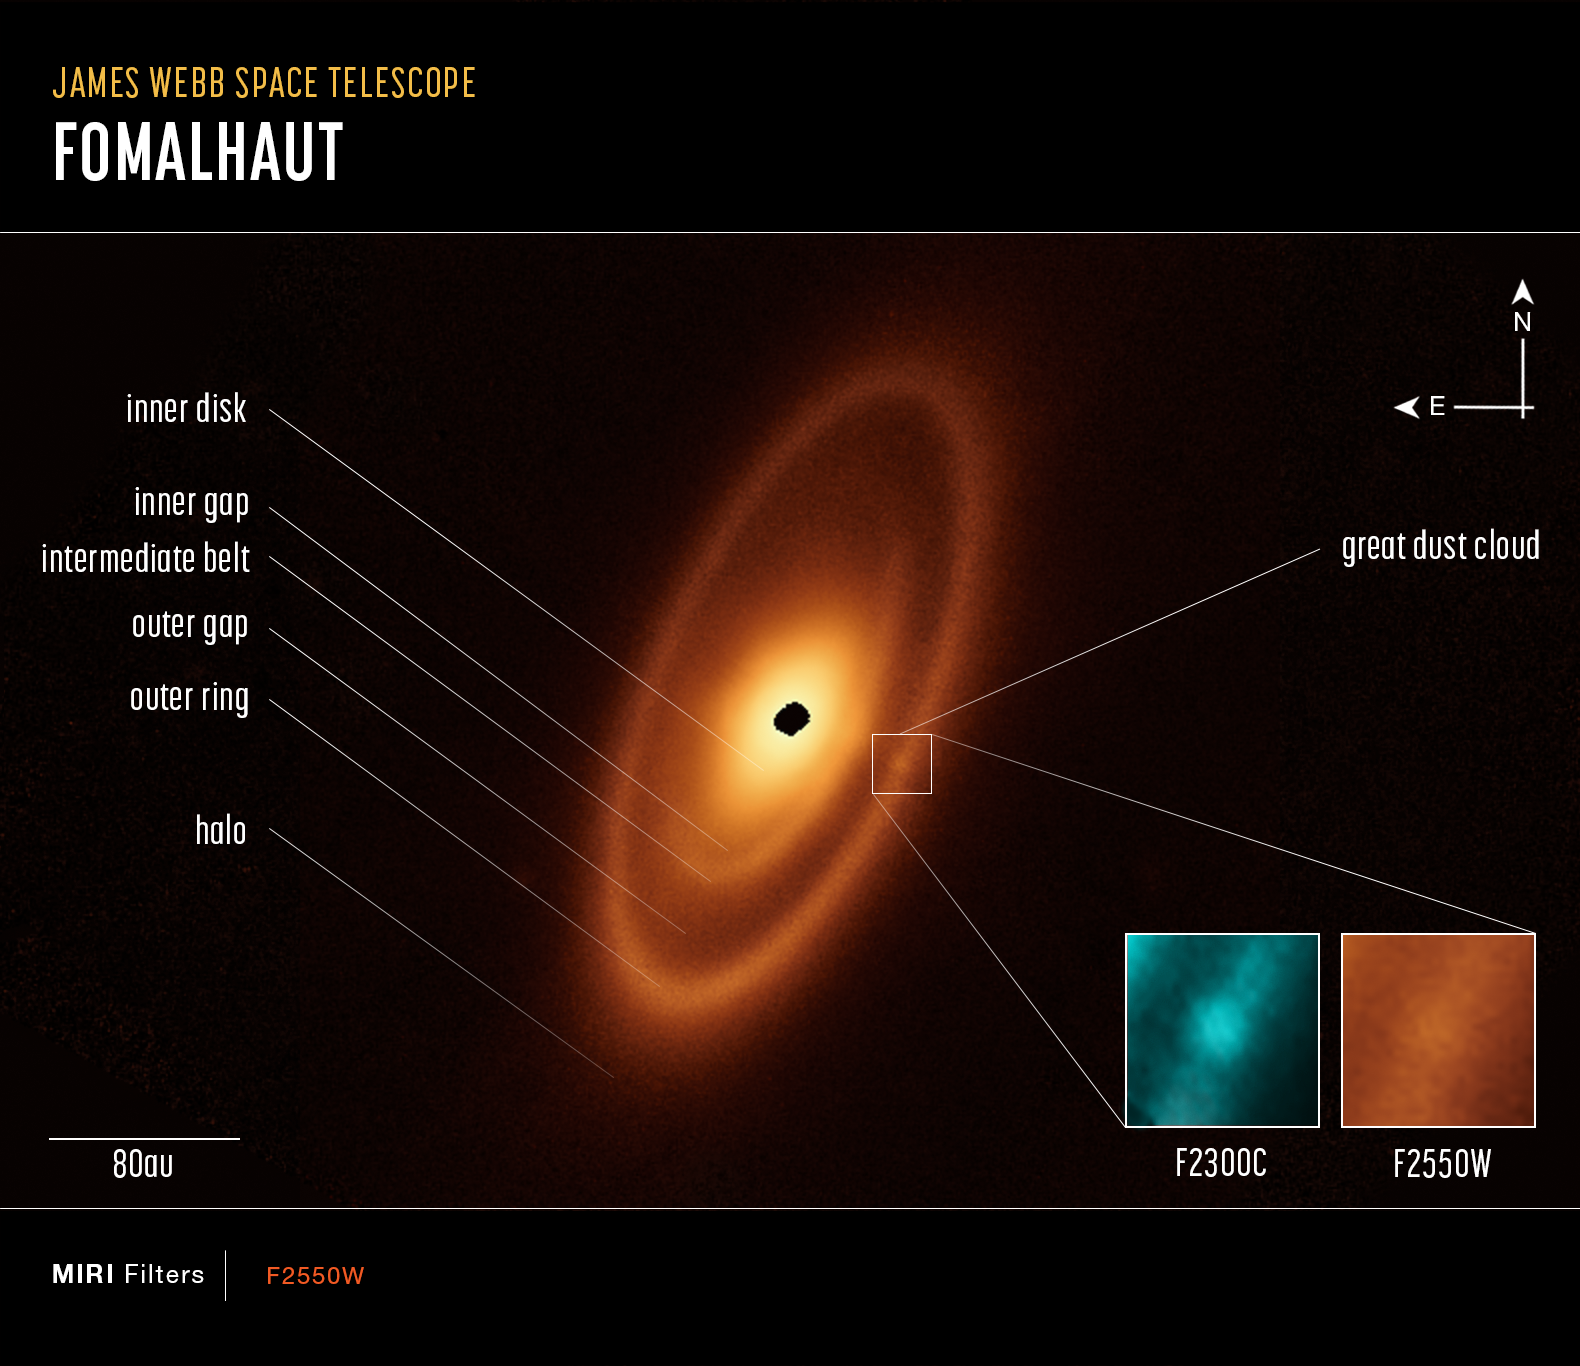

Webb inspects dusty debris disc around Fomalhaut (annotated)

This image of the Fomalhaut system, captured by Webb’s Mid-Infrared Instrument (MIRI), shows compass arrows, scale bar, and colour key for reference. Labels indicate the various structures. At right, a great dust cloud is highlighted and pullouts show it in two infrared wavelengths: 23 and 25.5 microns.

The north and east compass arrows show the orientation of the image on the sky. Note that the relationship between north and east on the sky (as seen from below) is flipped relative to direction arrows on a map of the ground (as seen from above).

The scale bar is labelled in astronomical units, which is the average distance between Earth and the Sun: 150 million kilometres. The outer ring is about 240 astronomical units in diameter.

This image shows invisible mid-infrared wavelengths of light that have been translated into visible-light colours. The colour key and labels show which MIRI filters were used when collecting the light.

Credit: NASA, ESA, CSA, A. Pagan (STScI), A. Gáspár (University of Arizona)